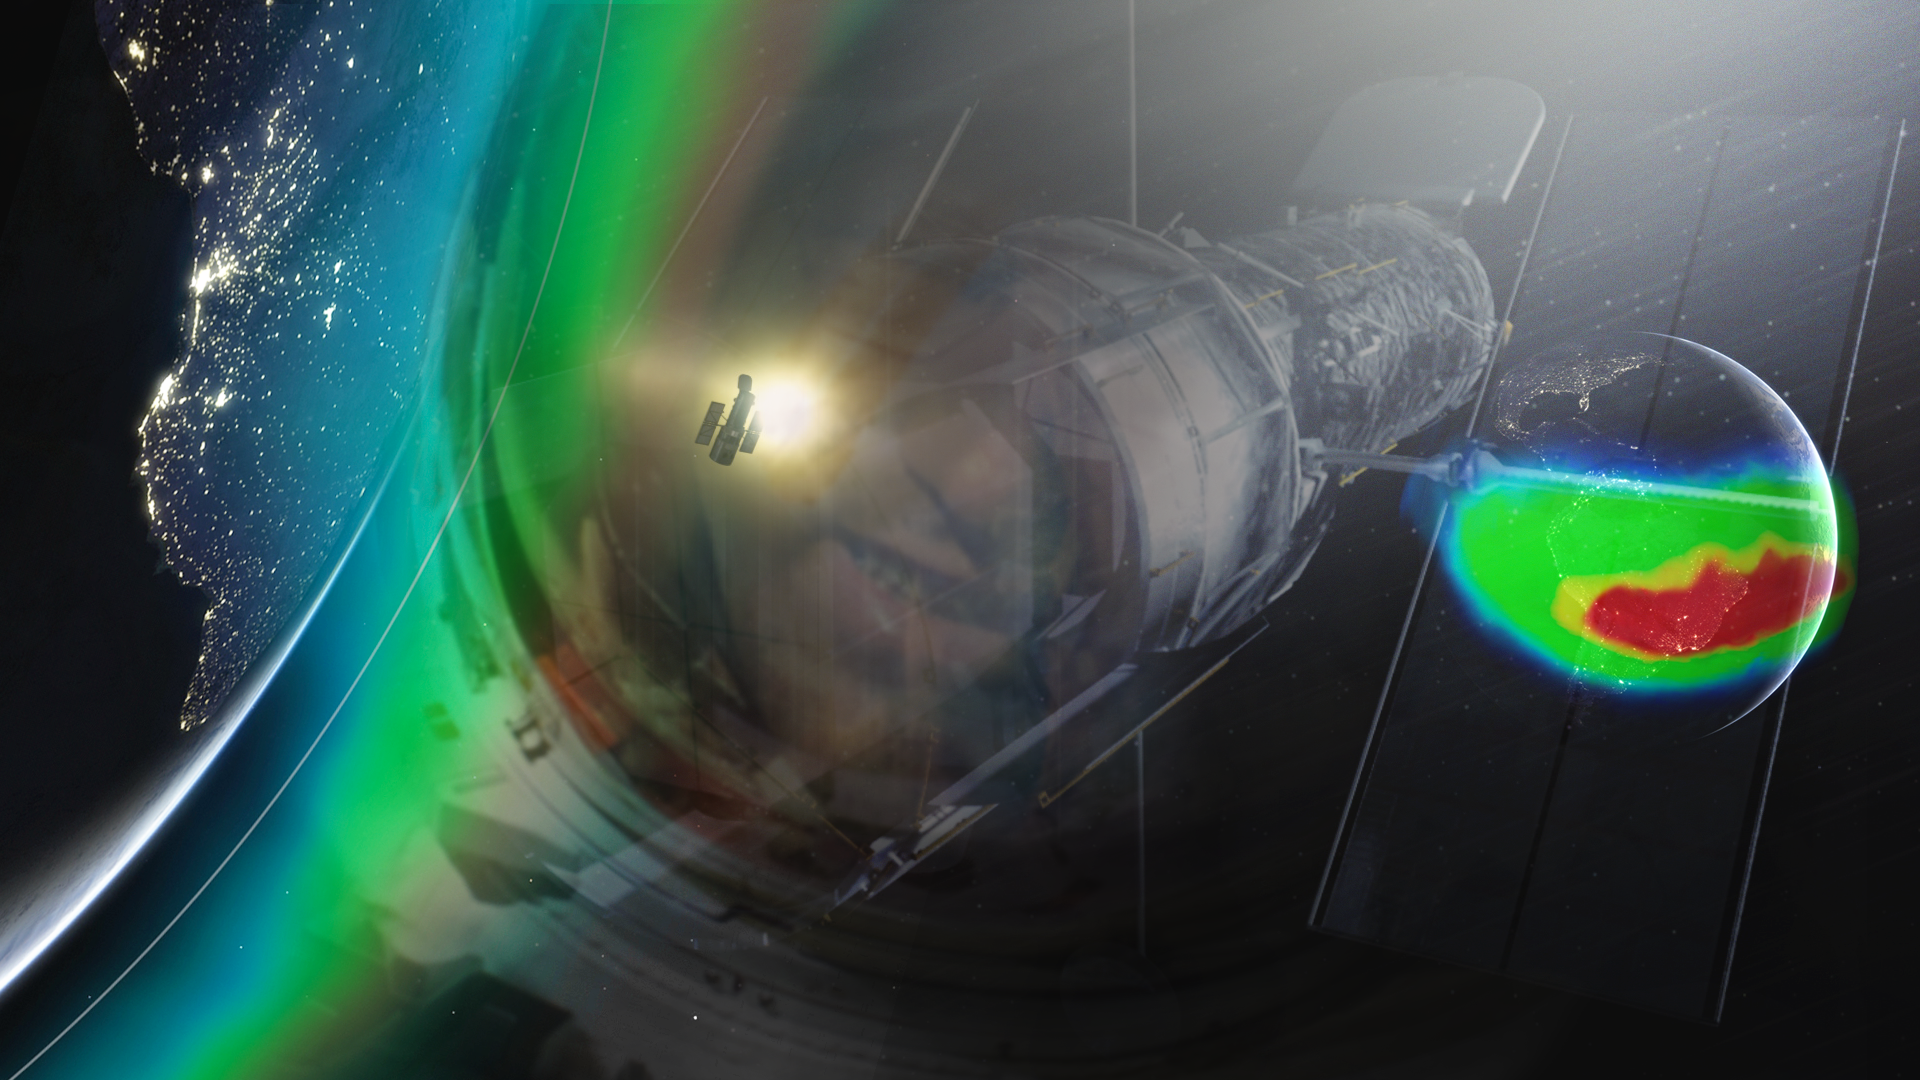

Illustration for Hubblecast 77: Hubble and the Bermuda Triangle of space.

This illustration is made up of screenshots from Hubblecast 77: Hubble and the Bermuda Triangle of space. The Hubblecast tells the story of what happens to Hubble in the mysterious region known as the South Atlantic Anomaly.

When satellites pass through this area they are bombarded with swarms of intensely high energy particles. This can produce "glitches" in astronomical data, malfunctioning of on-board electronics, and has even shut down unprepared spacecraft for weeks!

Credit: NASA, ESA, M. Kornmesser (ESA/Hubble)